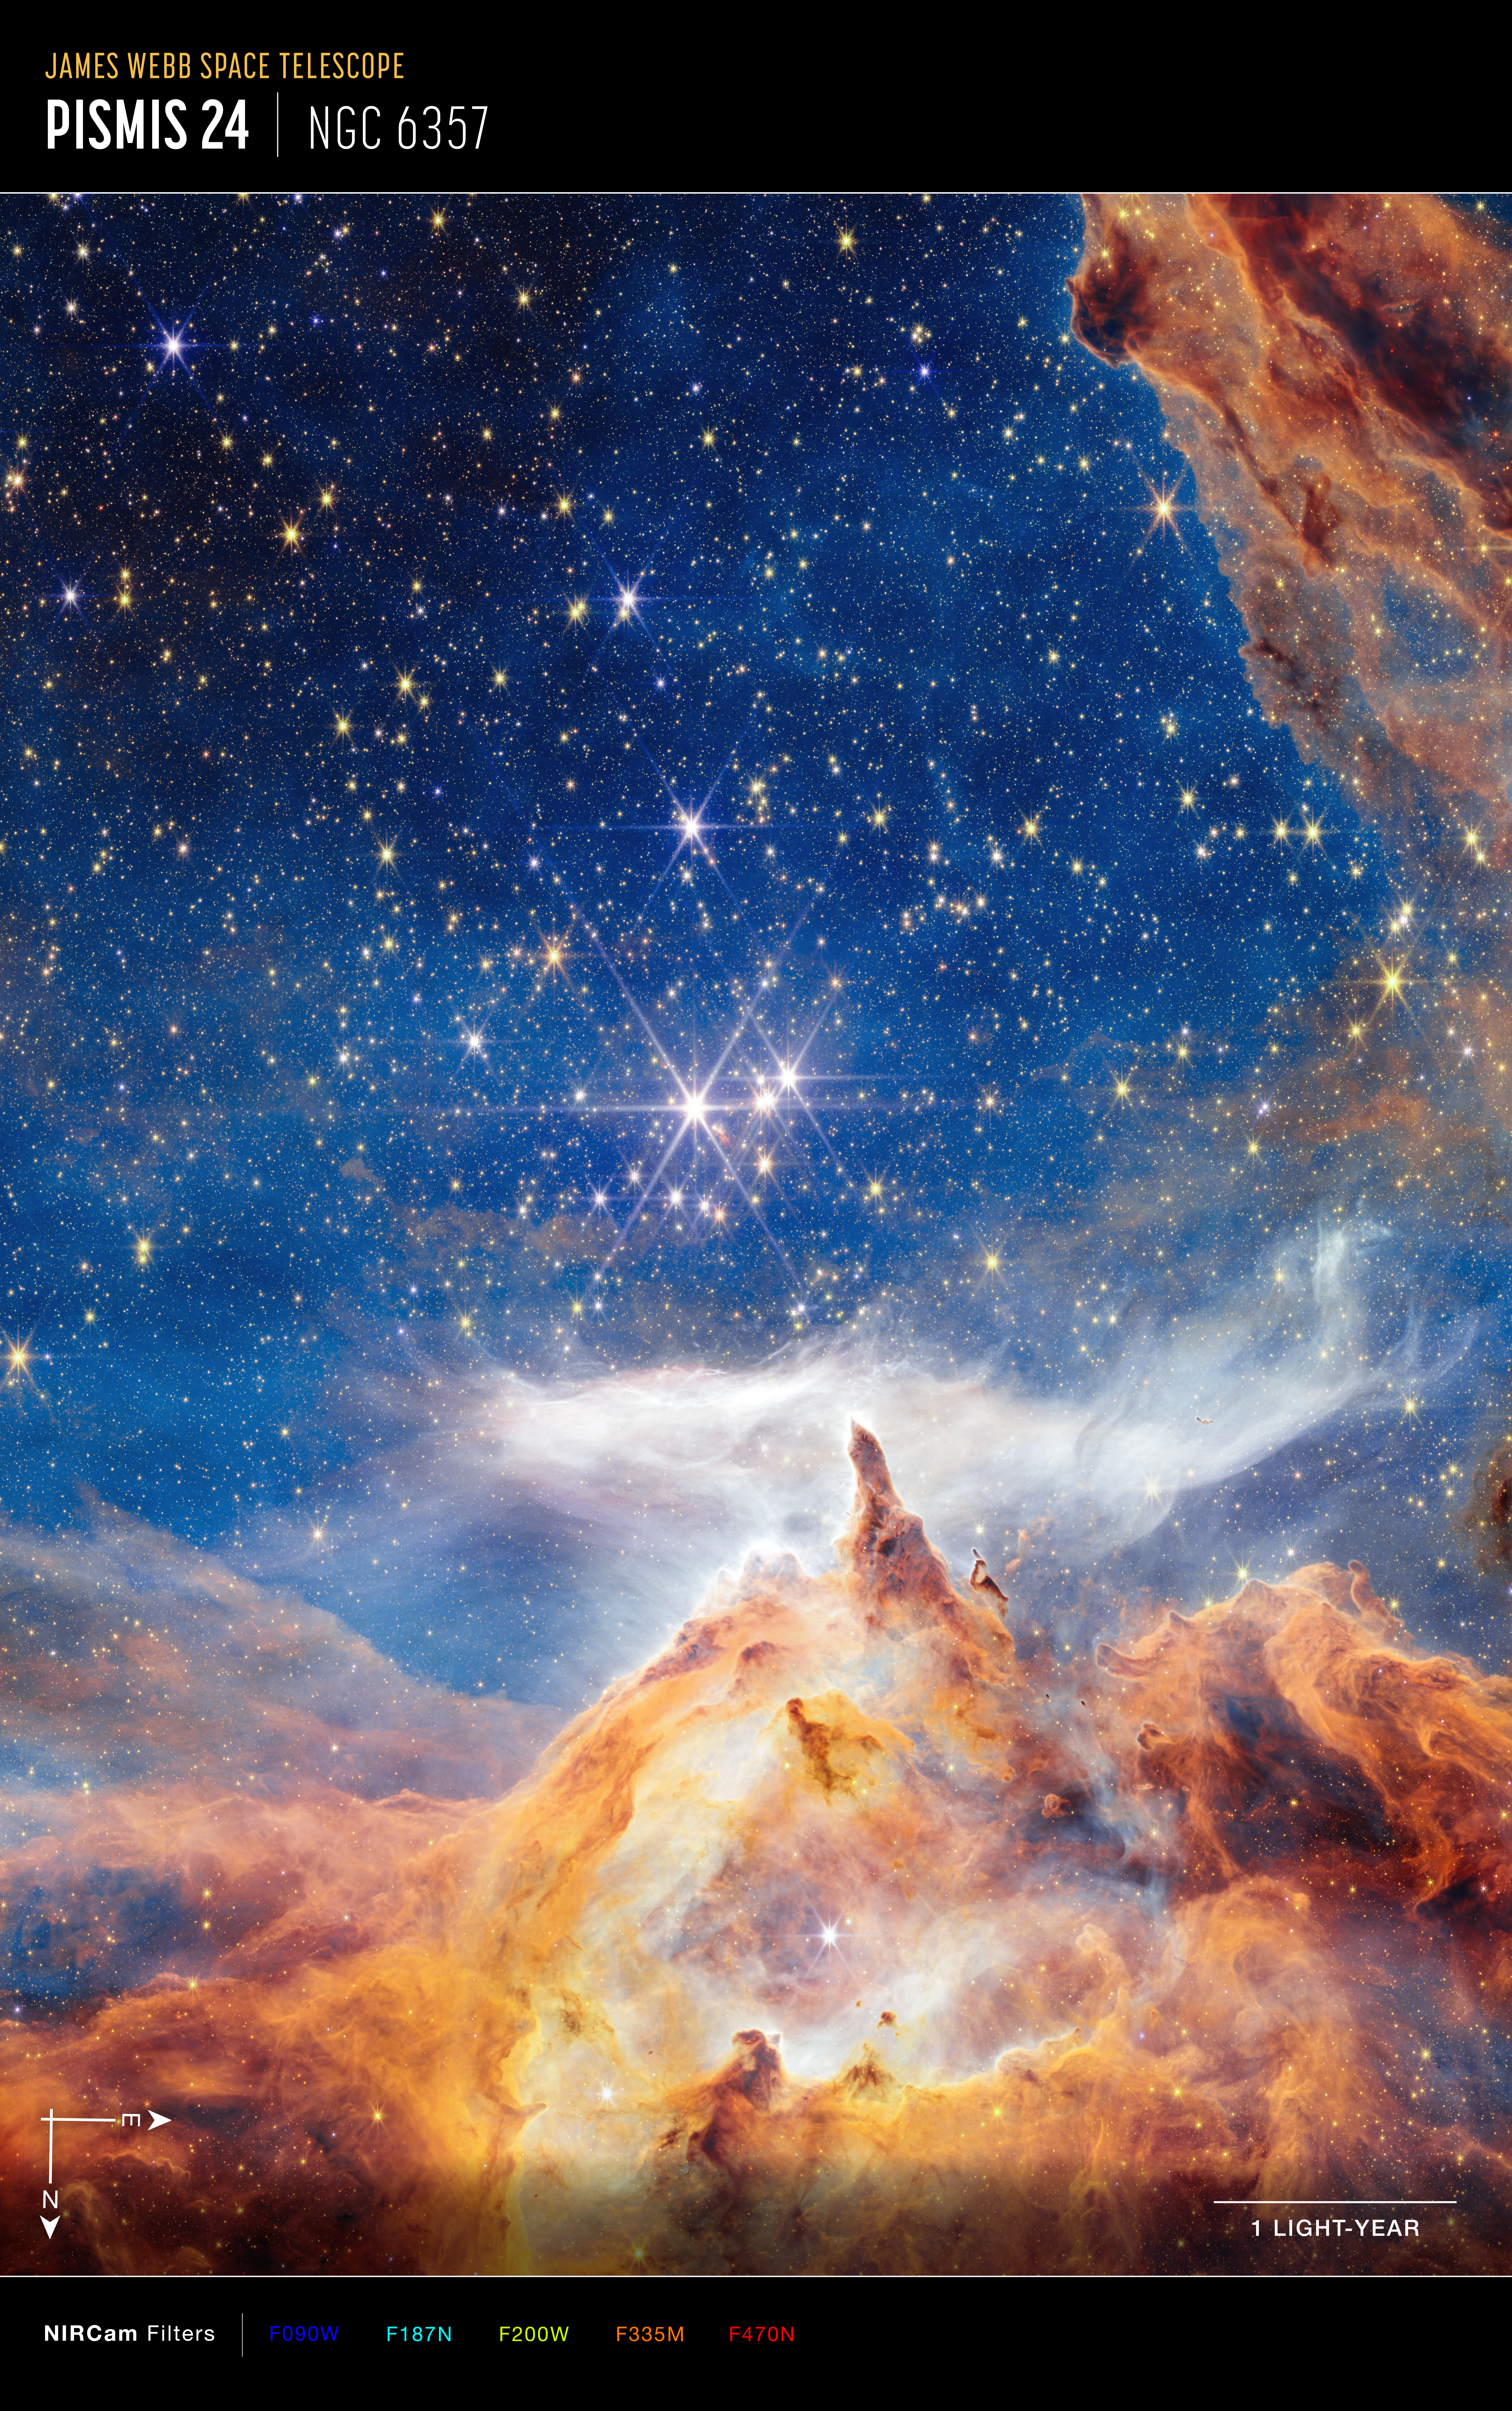

Pismis 24 (NIRCam image, annotated)

This sparkling scene of star birth was captured by the NASA/ESA/CSA James Webb Space Telescope. What appears to be a craggy, starlit mountaintop kissed by wispy clouds is actually a cosmic dust-scape being eaten away by the blistering winds and radiation of nearby, massive, infant stars.

Called Pismis 24, this young star cluster resides in the core of the nearby Lobster Nebula, approximately 5,500 light-years from Earth in the constellation Scorpius. Home to a vibrant stellar nursery and one of the closest sites of massive star birth, Pismis 24 provides rare insight into large and massive stars. This region is one of the best places to explore the properties of hot young stars and how they evolve.

Credit: NASA, ESA, CSA, and STScI, A. Pagan (STScI)